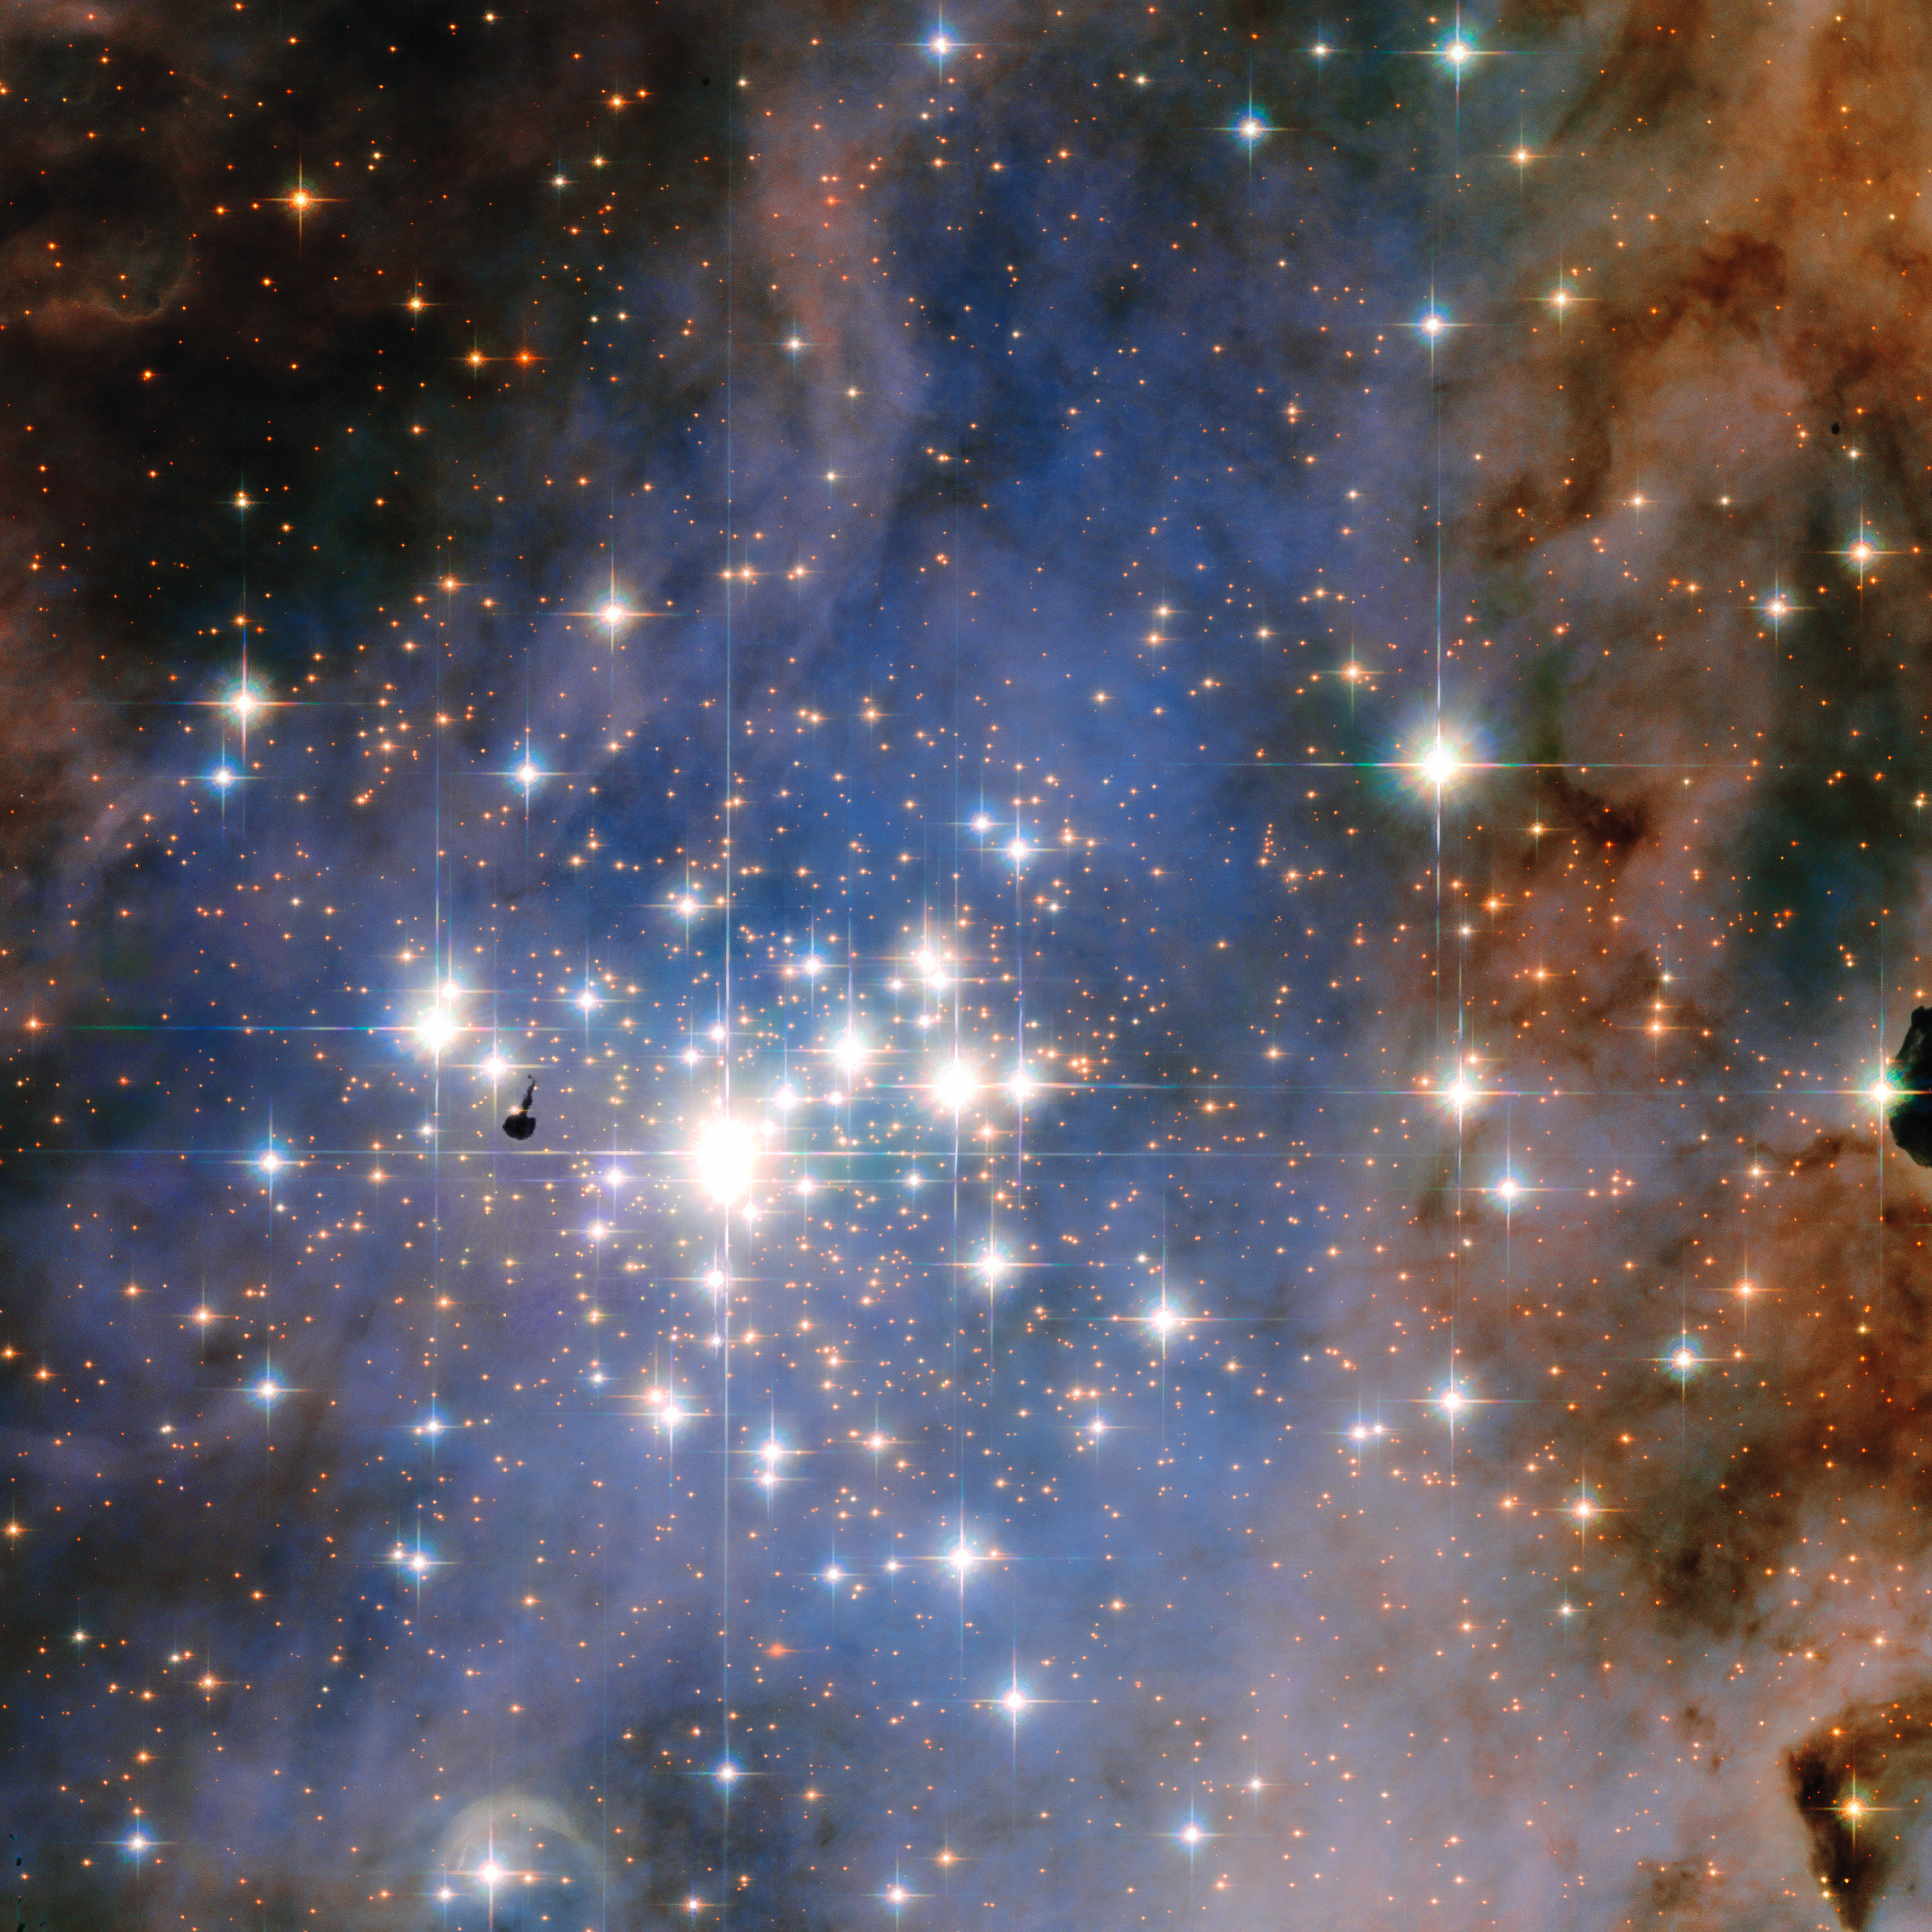

Dazzling diamonds of Trumpler 14

This NASA/ESA Hubble Space Telescope image features the star cluster Trumpler 14. One of the largest gatherings of hot, massive and bright stars in the Milky Way, this cluster houses some of the most luminous stars in our entire galaxy.

The prominent dark patch, close to the centre of the cluster is a so called Bok globule: this is an isolated and relatively small dark nebula, containing dense dust and gas. These objects are still subjects of intense research as their structure and density remains somewhat a mystery.

Credit: NASA & ESA, Jesús Maíz Apellániz (Centro de Astrobiología, CSIC-INTA, Spain)